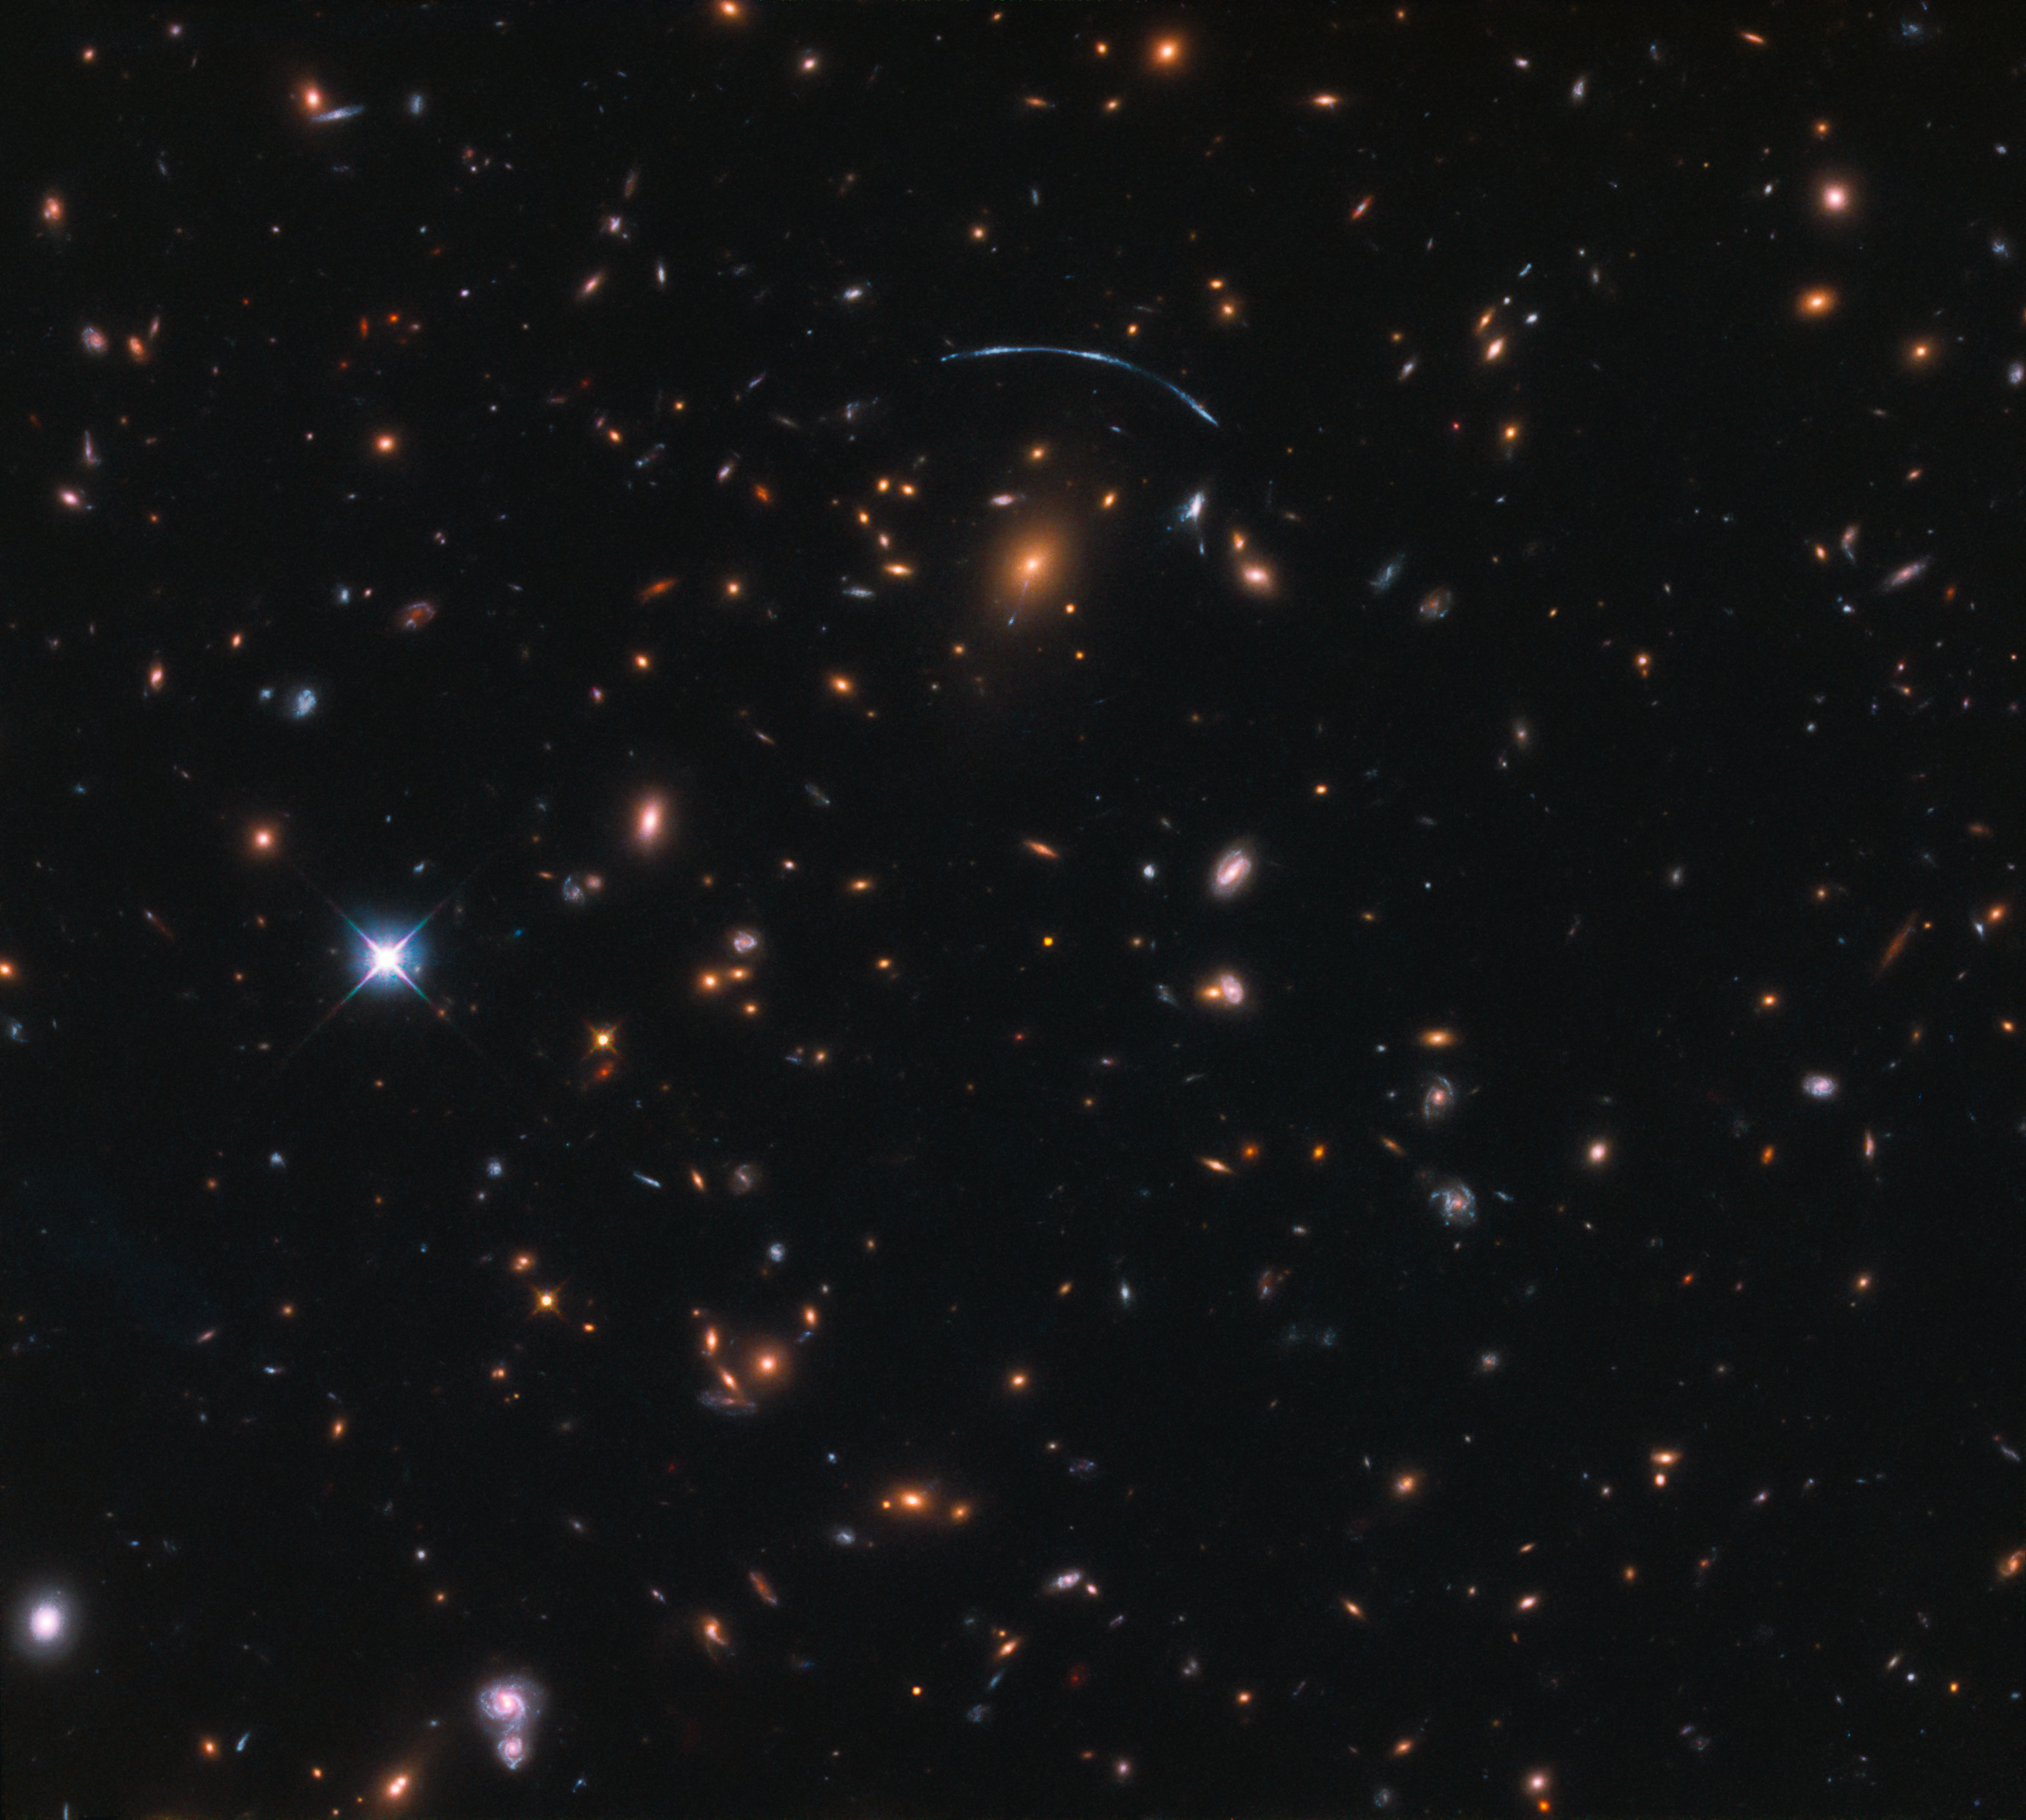

Of bent time and jellyfish

At first glance, a bright blue crescent immediately jumps out of this NASA/ESA Hubble Space Telescope image: is it a bird? A plane? Evidence of extraterrestrial life? No — it’s a galaxy.

The shape of this galaxy admittedly appears to be somewhat bizarre, so confusion would be forgiven. This is due to a cosmic phenomenon called gravitational lensing. In this image, the gravitational influence of a massive galaxy cluster (called SDSS J1110+6459) is causing its surroundings spacetime to bend and warp, affecting the passage of any nearby light. This cluster to the lower left of the blue streak; a few more signs of lensing (streaks, blobs, curved lines, distorted shapes) can be seen dotted around this area.

This image also features a rare and interesting type of galaxy called a jellyfish galaxy, visible just right next to the cluster and apparently dripping bright blue material. These are galaxies that lose gas via a process called galactic ram pressure stripping, where the drag caused by the galaxy moving through space causes gas to be stripped away.

Credit: ESA/Hubble & NASA Acknowledgement: Judy Schmidt